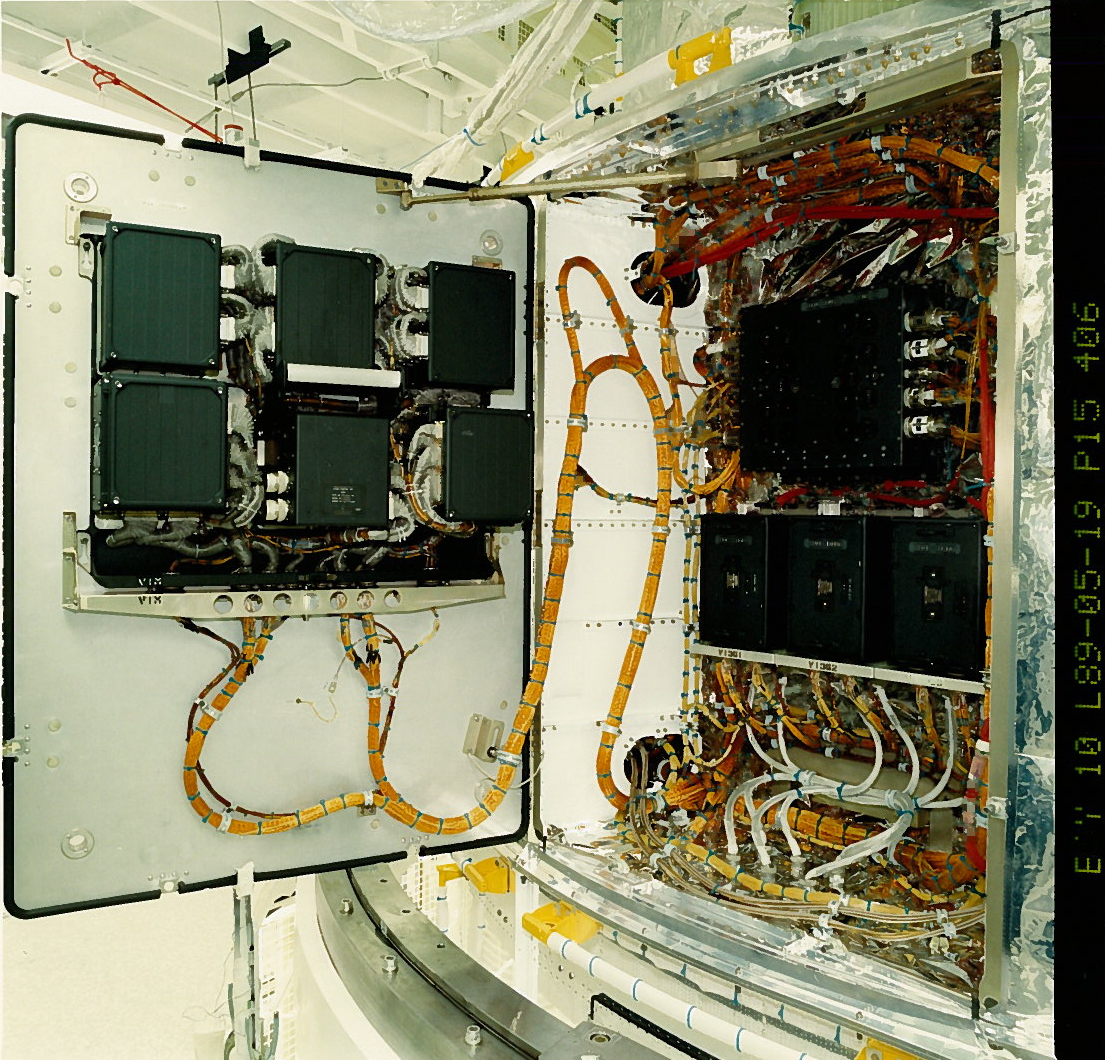

Hubble enters safe mode

At approximately 02:00 (CEST) on Sunday September 28, the NASA/ESA Hubble Space Telescope automatically entered safe mode when errors were detected in the Control Unit/Science Data Formatter-Side A. This component is essential for the storage and transmission of data from the telescope's science instruments back to Earth. Ground control attempts to reset the device and obtain a download of the payload computer's memory were unsuccessful.

NASA specialists are currently investigating the problem and are in the process of planning a switch-over to the redundant Side B. This is a complex task and requires that five other modules are also switched to communicating via the B channel. Many of these modules were last activated 20 years ago during ground testing prior to launch. If this transition is successfully completed the telescope could rapidly be returned to science operations.

NASA is now also evaluating the possibility of flying a back-up replacement system as part of the Servicing Mission 4 that was originally scheduled for October 14. The replacement part, although already manufactured, needs to be fully checked and tested at the NASA Goddard Facility and as a result will not be ready for delivery to the Shuttle before early January 2009.

Image caption: The Hubble's Science Instrument Control and Data Handling Unit (at left). Credit: NASA.

Credit: NASA & ESA